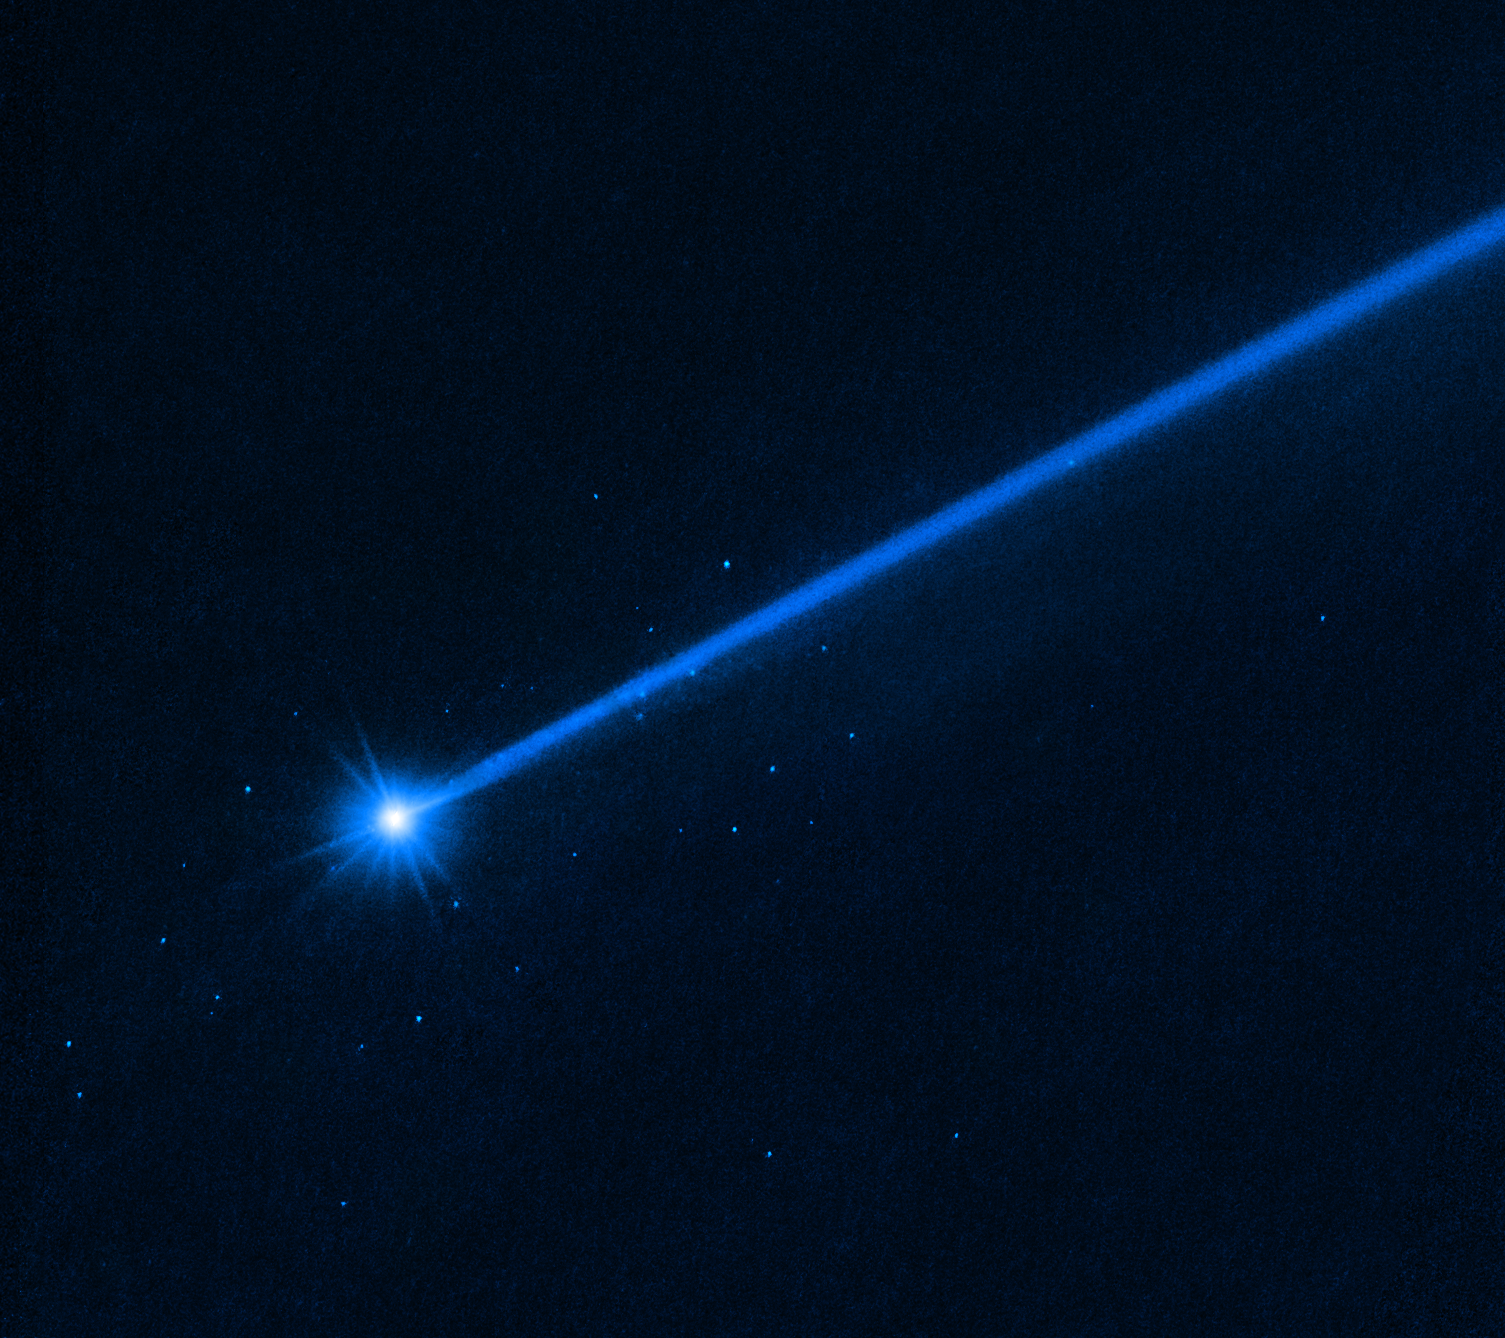

Hubble sees boulders escaping from asteroid Dimorphos

This NASA/ESA Hubble Space Telescope image of the asteroid Dimorphos was taken on 19 December 2022, nearly four months after the asteroid was impacted by NASA’s DART (Double Asteroid Redirection Test) mission. Hubble’s sensitivity reveals a few dozen boulders knocked off the asteroid by the force of the collision. These are among the faintest objects Hubble has ever photographed inside the Solar System. The ejected boulders range in size from 1 metre to 6.7 metres across, based on Hubble photometry. They are drifting away from the asteroid at around a kilometre per hour. The discovery yields invaluable insights into the behaviour of a small asteroid when it is hit by a projectile for the purpose of altering its trajectory.

Credit: NASA, ESA, D. Jewitt (UCLA)